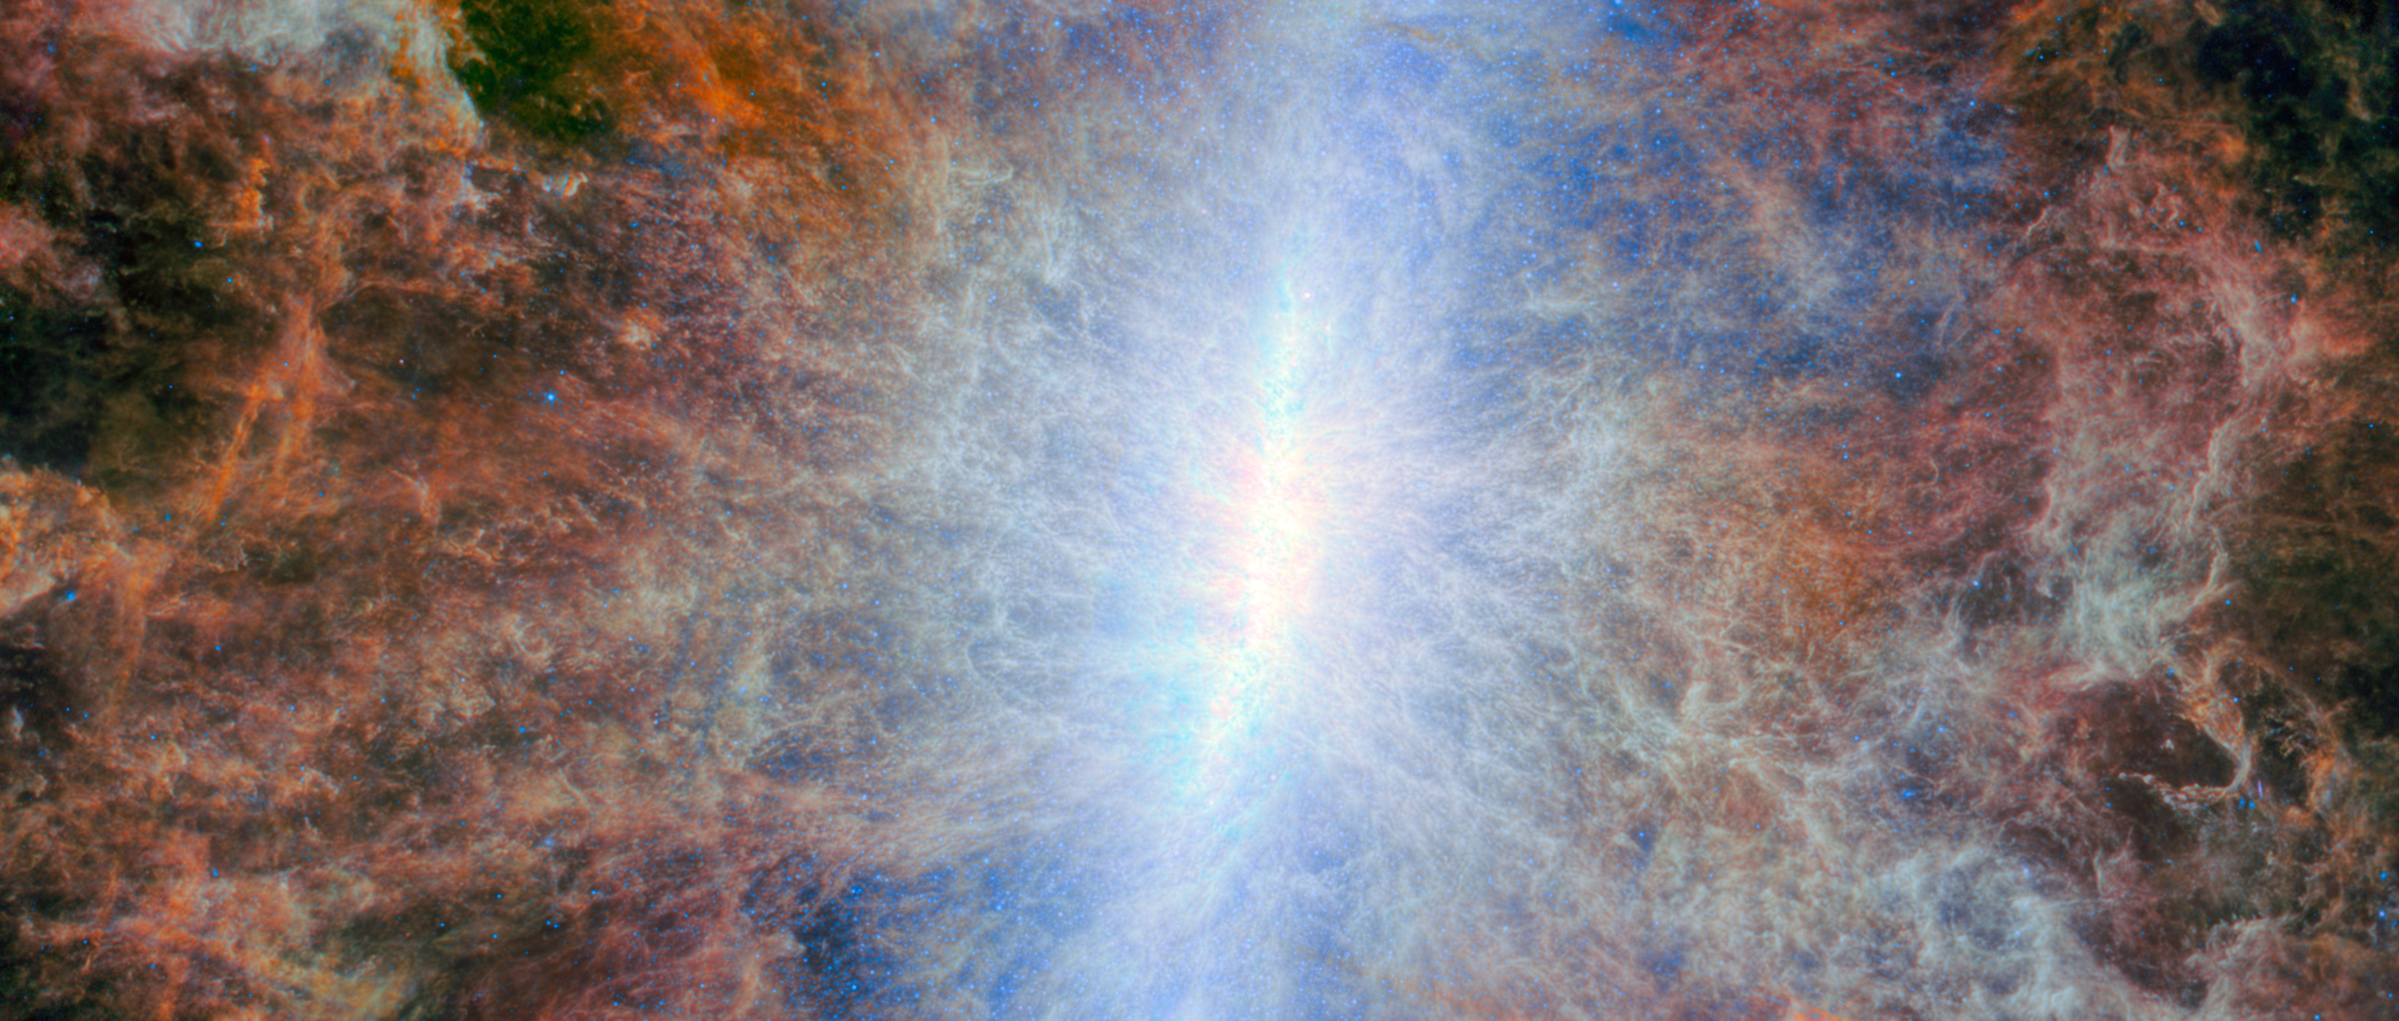

A starburst shines in infrared

Featured in this NASA/ESA/CSA James Webb Space Telescope Picture of the Month is a nearby galaxy that outshines the Milky Way. This galaxy, called Messier 82 (M82) or the Cigar Galaxy, is situated just 12 million light-years away in the constellation Ursa Major.

Despite being smaller than the Milky Way, M82 is five times as luminous as our home galaxy and forms stars ten times faster. M82 is classified as a starburst galaxy because it is forming new stars at a rate much faster than expected for a galaxy of its mass, especially at its centre. In visible-light images of M82, the central hotbed of activity is obscured by a network of thick and dusty clouds, but Webb’s infrared eyes are designed to peer through this cloudy veil and reveal the activity behind them.

What caused M82’s burst of star formation? The answer likely lies with its neighbour, the larger spiral galaxy M81. Researchers suspect that the two galaxies have interacted gravitationally, sending gas pouring into M82’s centre millions of years ago. The influx of gas provided the raw material for new stars to form — and form they did! M82 is home to more than 100 super star clusters, some of which are still in the process of forming and are blanketed with dense, dusty gas. Super star clusters are more massive and luminous than typical star clusters; these each contain hundreds of thousands of stars.

A previous Webb image of M82, featuring data from its Near-InfraRed Camera (NIRCam), was released in 2024. The earlier image focused on the very core of the galaxy, where individual clusters of young stars stand out against the clumps and tendrils of gas. This new image from Webb’s Mid-InfraRed Instrument (MIRI) provides a remarkable, mostly starless view of M82. The image is instead dominated by the emission from warm dust and intricate clouds of sooty organic molecules called polycyclic aromatic hydrocarbons or PAHs.

The emission from the PAH molecules traces the galaxy’s broad outflows, which are launched by the intense radiation and winds from the hot young stars of the central super star clusters. Though super star clusters are the source of M82’s powerful galactic winds, the winds may spell the end for the galaxy’s starburst era: as the winds billow into intergalactic space, they likely carry with them the cool gas needed to form even more stars.

Credit: ESA/Webb, NASA & CSA, A. Bolatto